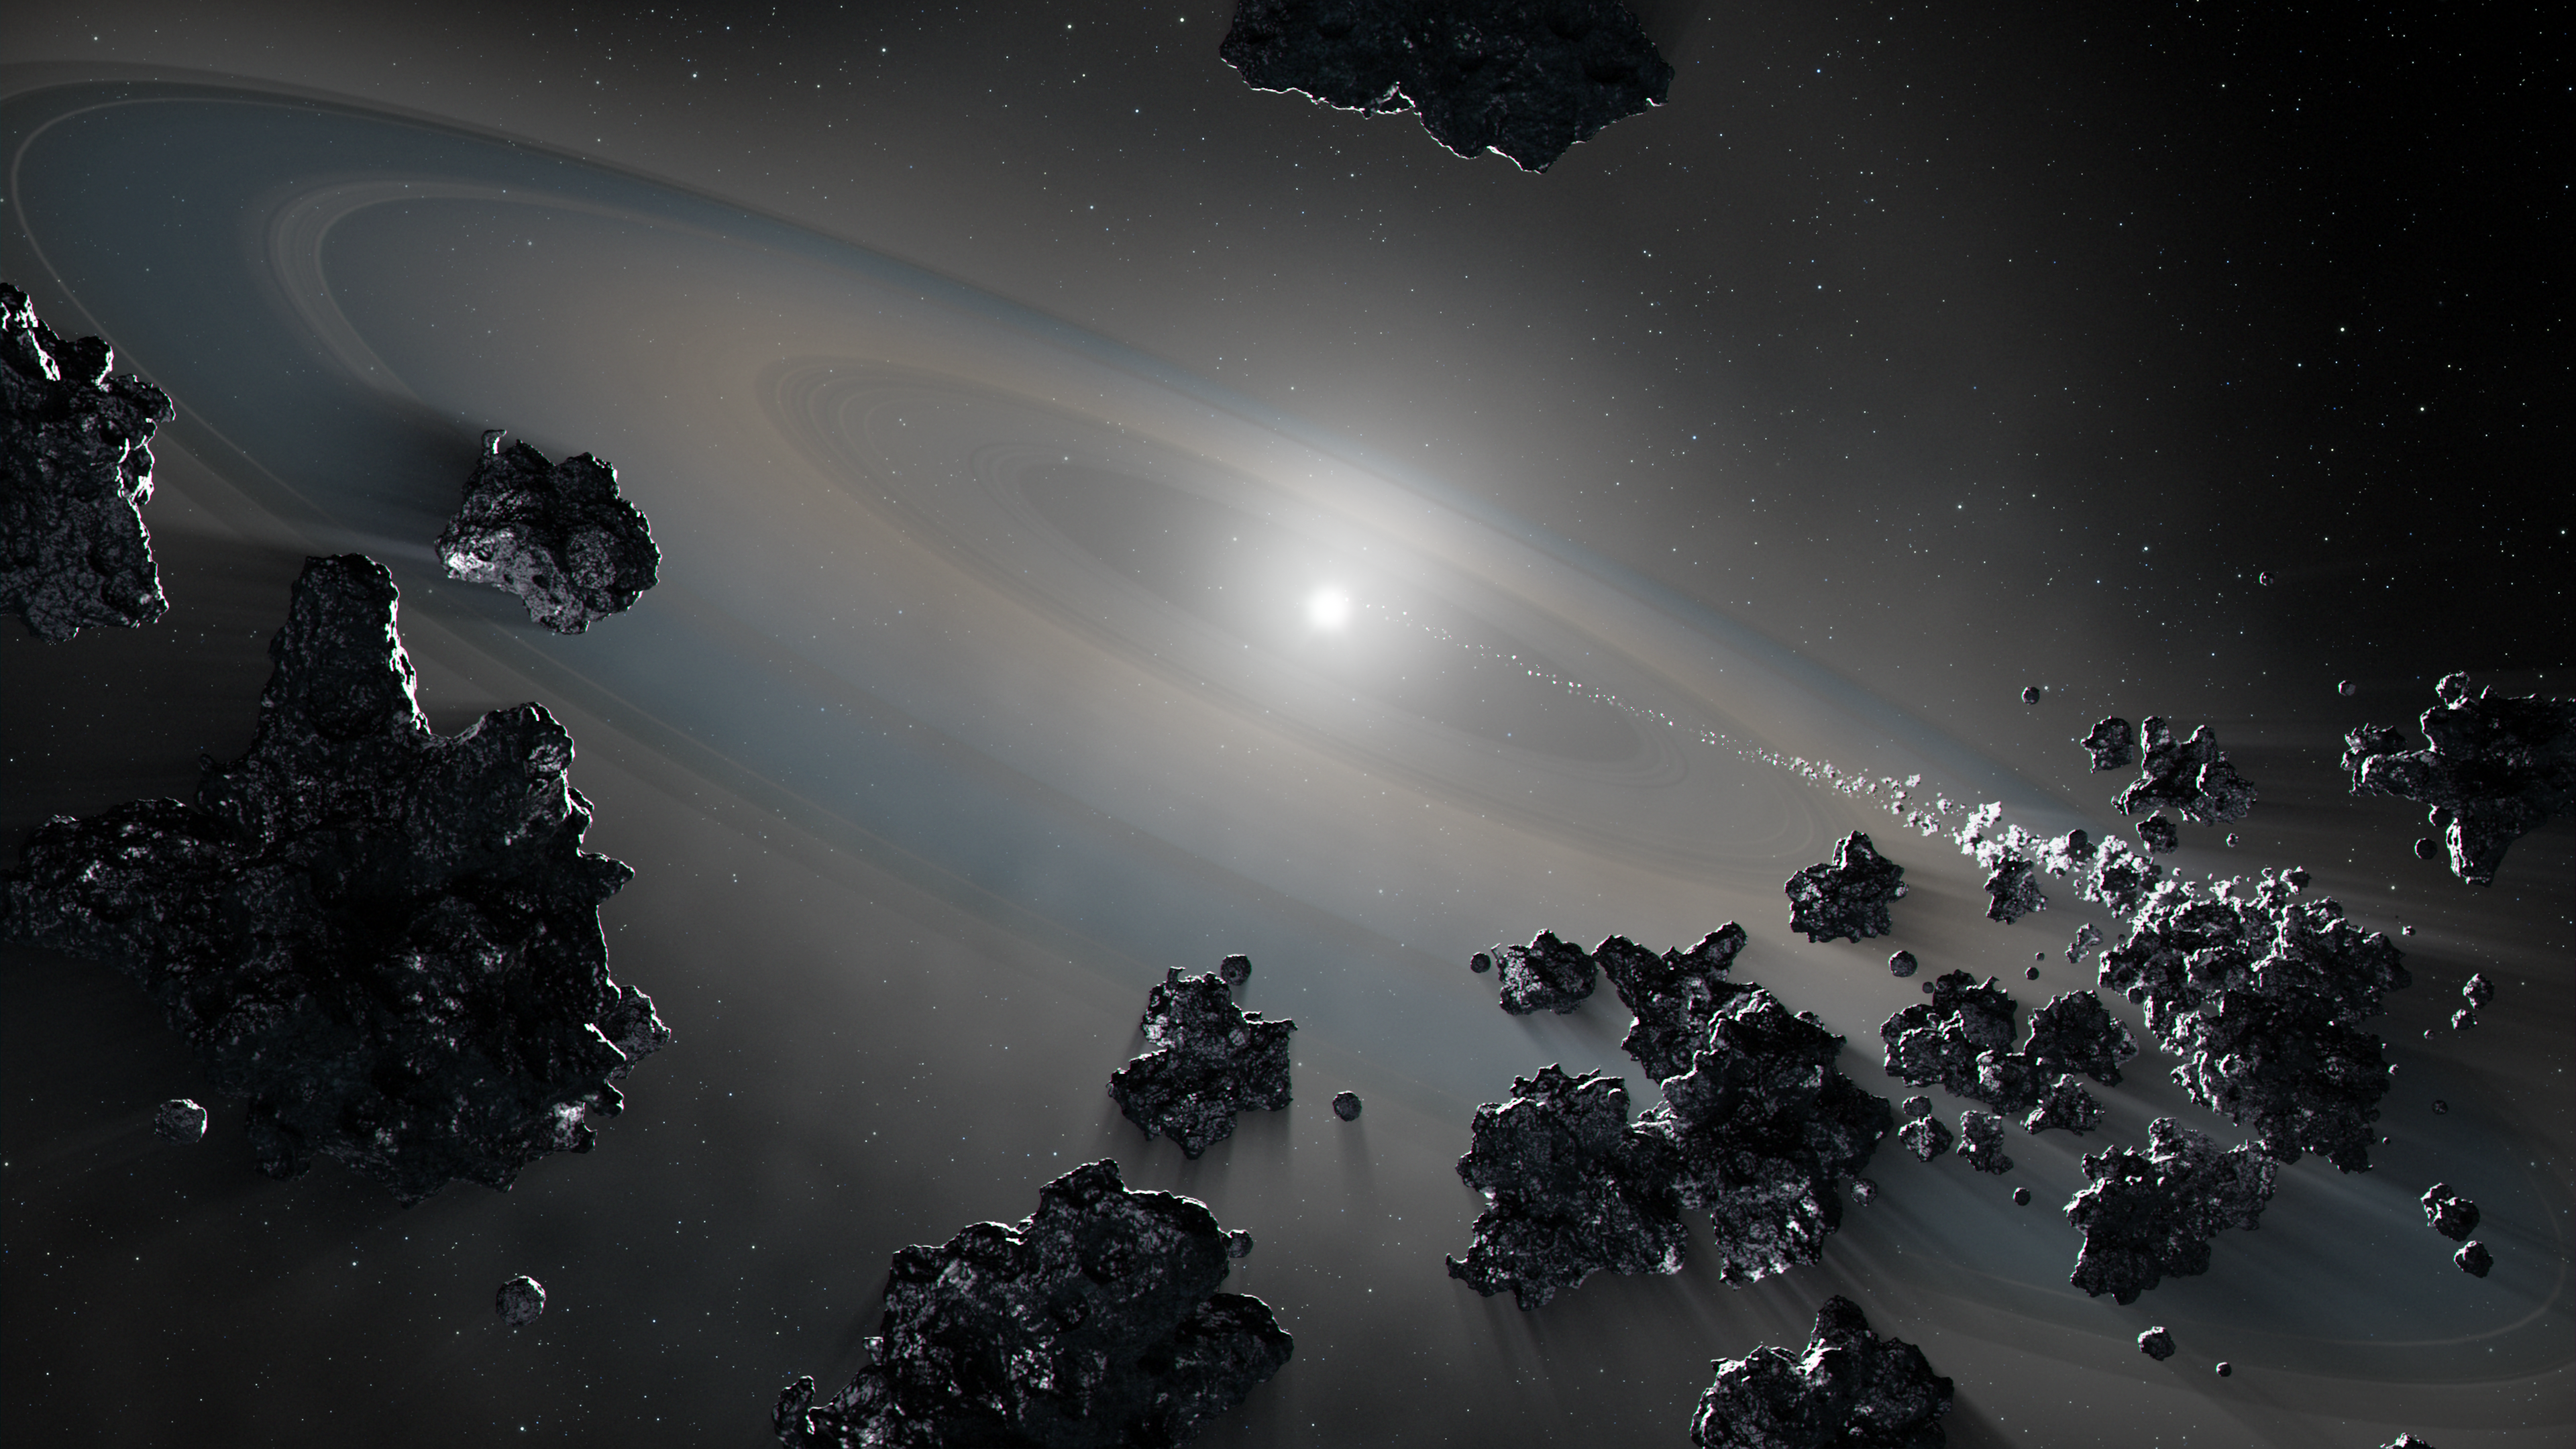

Hubble Reveals Surviving Companion Star In Aftermath Of Supernova

This illustration shows a white dwarf star syphoning off debris from shattered objects in a planetary system.

Archival data from the NASA/ESA Hubble Space Telescope helped detect the spectral signature of the vaporised debris that revealed a combination of rocky-metallic and icy material, the ingredients of planets. The findings help describe the violent nature of evolved planetary systems and the composition of its disintegrating bodies.

The findings are based on analysing material captured by the atmosphere of the nearby white dwarf star G238-44. A white dwarf is what remains of a star like our Sun after it sheds its outer layers and stops burning fuel through nuclear fusion.

Credit: NASA, ESA, J. Olmsted (STScI)